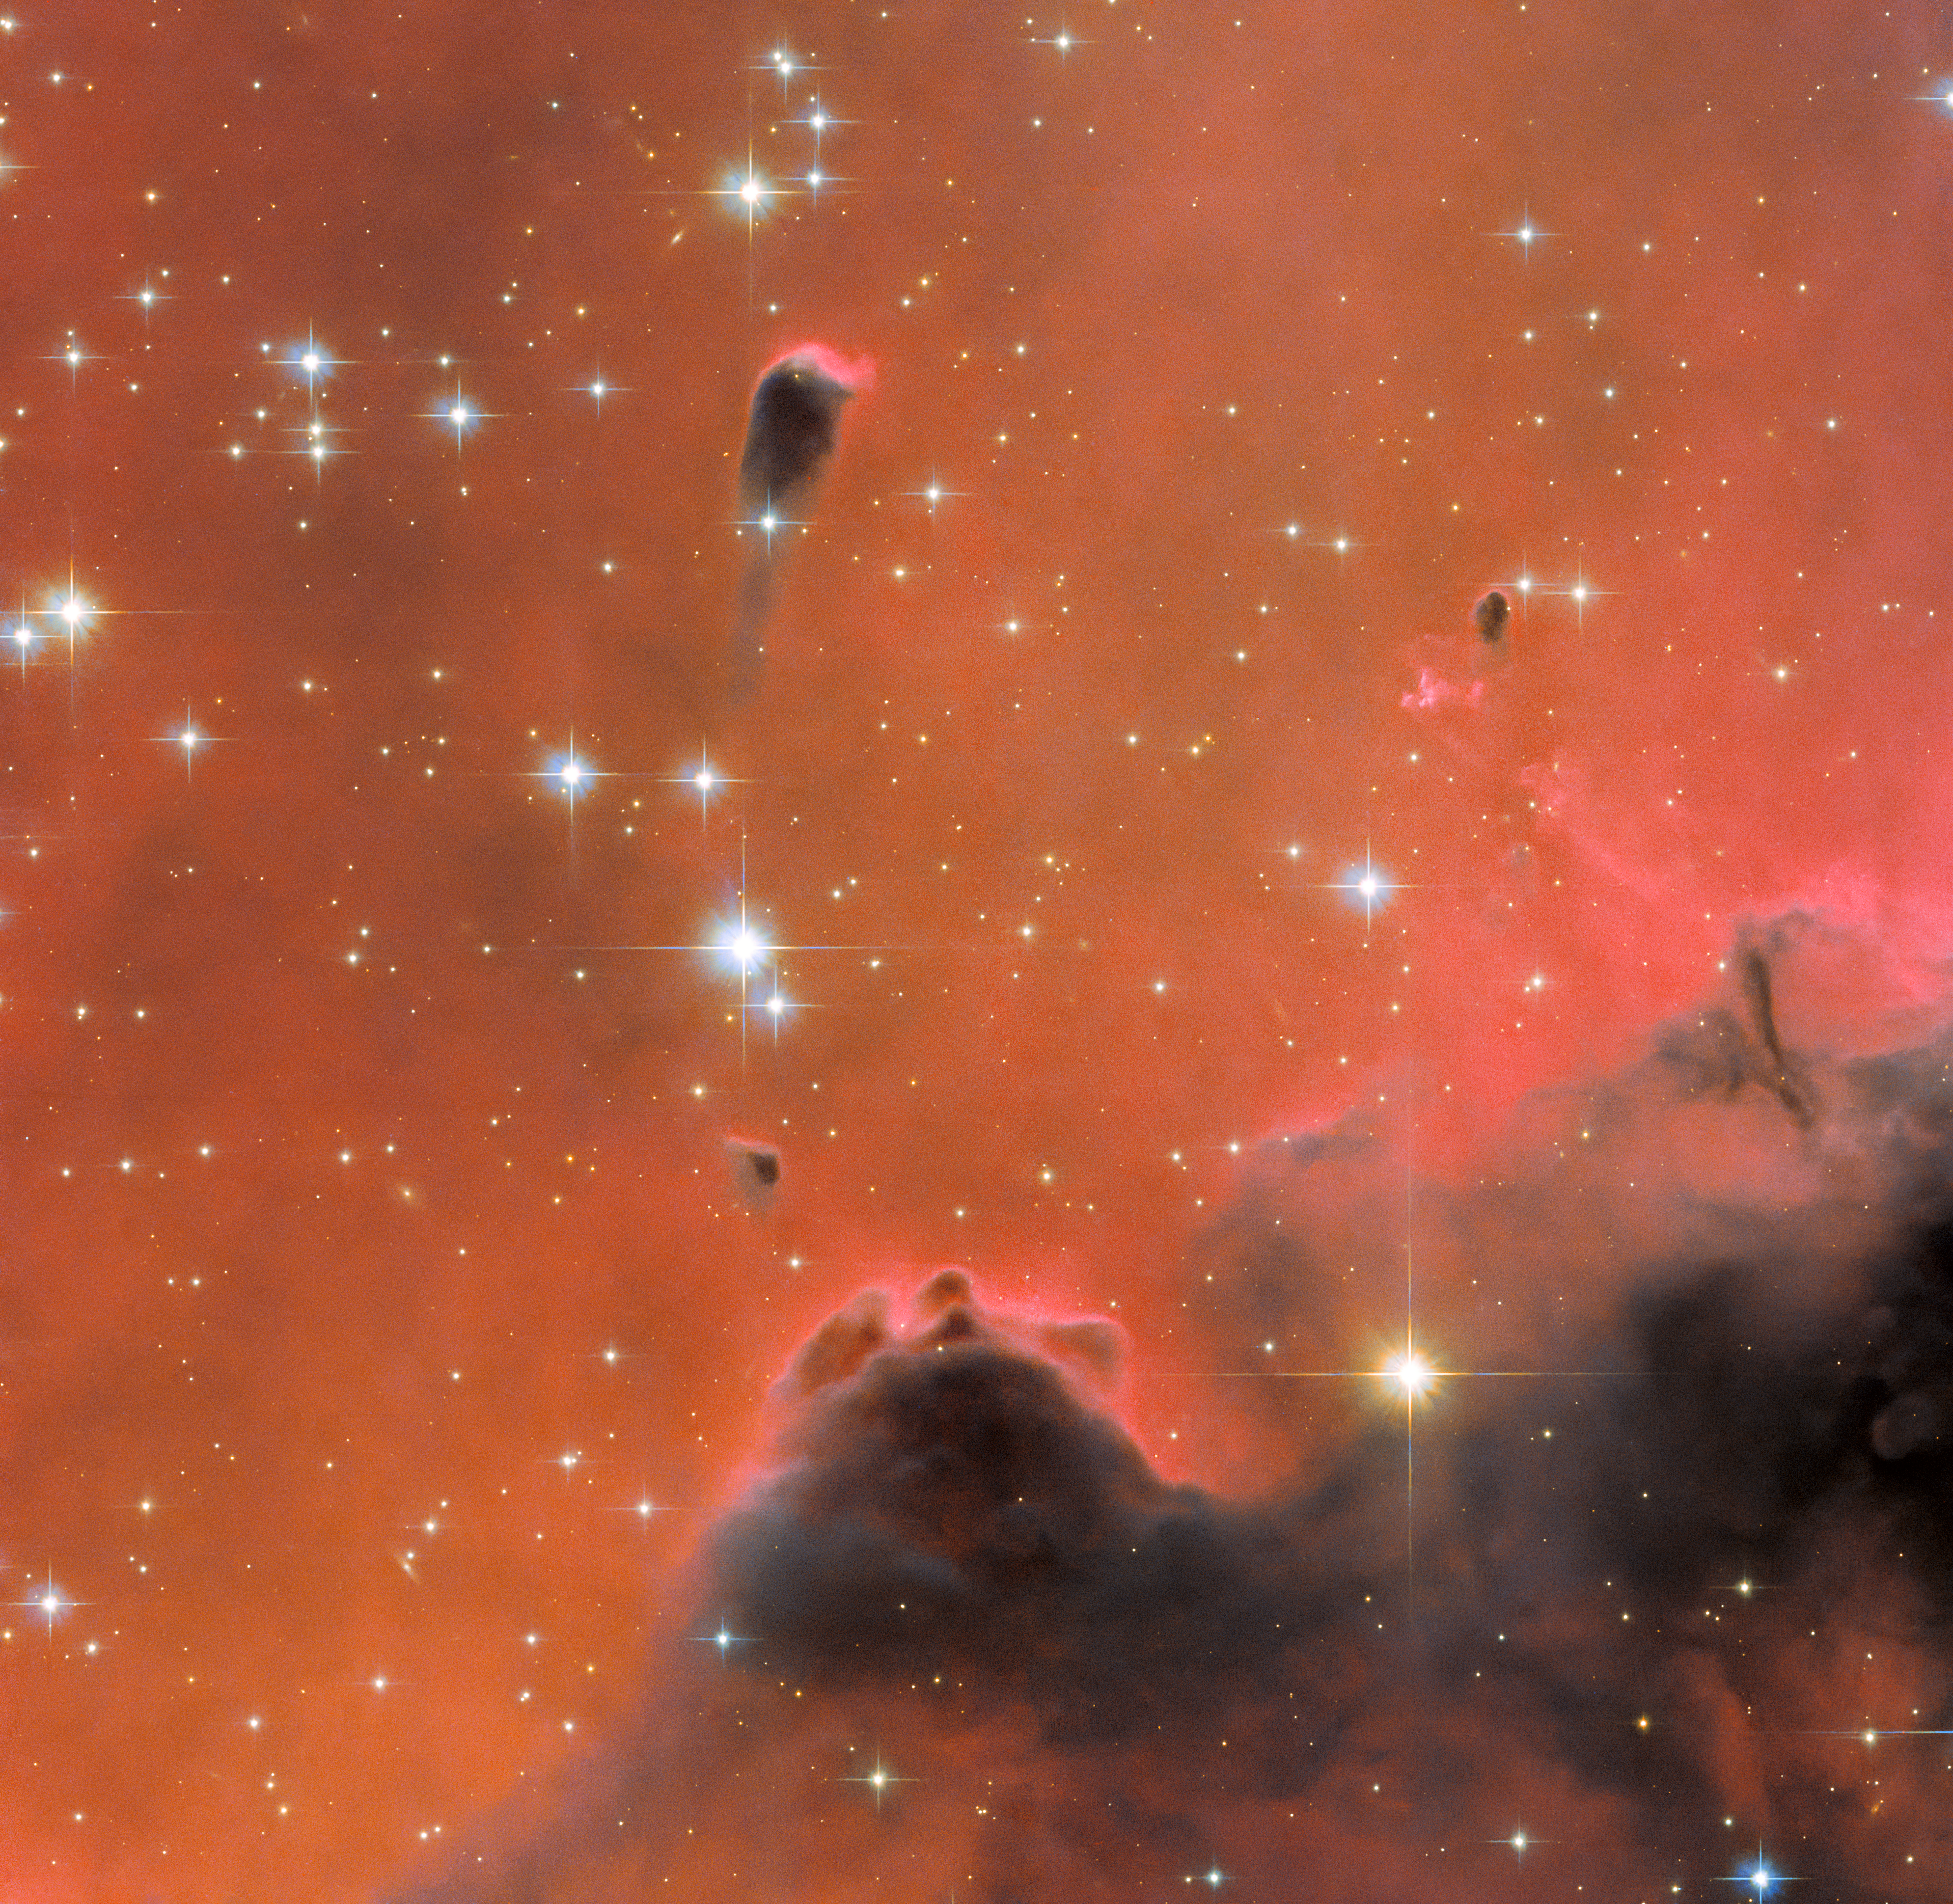

Festive and Free-Floating

Just in time for the festive season, this new Picture of the Week from the NASA/ESA Hubble Space Telescope features a glistening scene in holiday red. This image shows a small region of the well-known nebula Westerhout 5, which lies about 7000 light-years from Earth. Suffused with bright red light, this luminous image hosts a variety of interesting features, including a free-floating Evaporating Gaseous Globule (frEGG). The frEGG in this image is the small tadpole-shaped dark region in the upper centre-left. This buoyant-looking bubble is lumbered with two rather uninspiring names — [KAG2008] globule 13 and J025838.6+604259.

FrEGGs are a particular class of Evaporating Gaseous Globules (EGGs). Both frEGGs and EGGs are regions of gas that are sufficiently dense that they photoevaporate less easily than the less compact gas surrounding them. Photoevaporation occurs when gas is ionised and dispersed away by an intense source of radiation — typically young, hot stars releasing vast amounts of ultraviolet light. EGGs were only identified fairly recently, most notably at the tips of the Pillars of Creation, which were captured by Hubble in iconic images released in 1995. FrEGGs were classified even more recently, and are distinguished from EGGs by being detached and having a distinct ‘head-tail’ shape. FrEGGs and EGGs are of particular interest because their density makes it more difficult for intense UV radiation, found in regions rich in young stars, to penetrate them. Their relative opacity means that the gas within them is protected from ionisation and photoevaporation. This is thought to be important for the formation of protostars, and it is predicted that many FrEGGs and EGGs will play host to the birth of new stars.

The frEGG in this image is a dark spot in the sea of red light. The red colour is caused by a particular type of light emission known as H-alpha emission. This occurs when a very energetic electron within a hydrogen atom loses a set amount of its energy, causing the electron to become less energetic and this distinctive red light to be released.

Credit: ESA/Hubble & NASA, R. Sahai